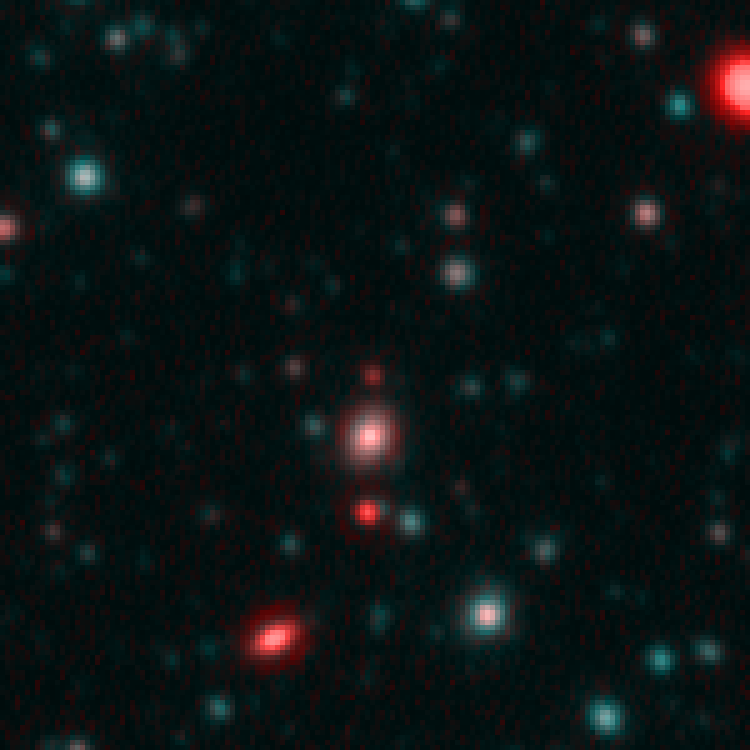

Spitzer and Hubble team up to find "Big Baby" galaxy in the newborn Universe [Spitzer/IRAC view]

This image demonstrates how data from two space observatories, the Spitzer and Hubble Space Telescopes, are used to identify one of the most distant galaxies ever seen. This galaxy is unusually massive for its youthful age of 800 million years. (After the Big Bang, the Milky Way by comparison, is approximately 13 billion years old.)

The Spitzer Infrared Array Camera (IRAC), easily detects the galaxy at longer infrared wavelengths. Spitzer's IRAC is sensitive to the light from older, redder stars, which should make up most of the mass in a galaxy. The brightness of the infrared galaxy suggests that it is quite massive.

Credit: NASA, ESA, B. Mobasher ( Space Telescope Science Institute and the European Space Agency)